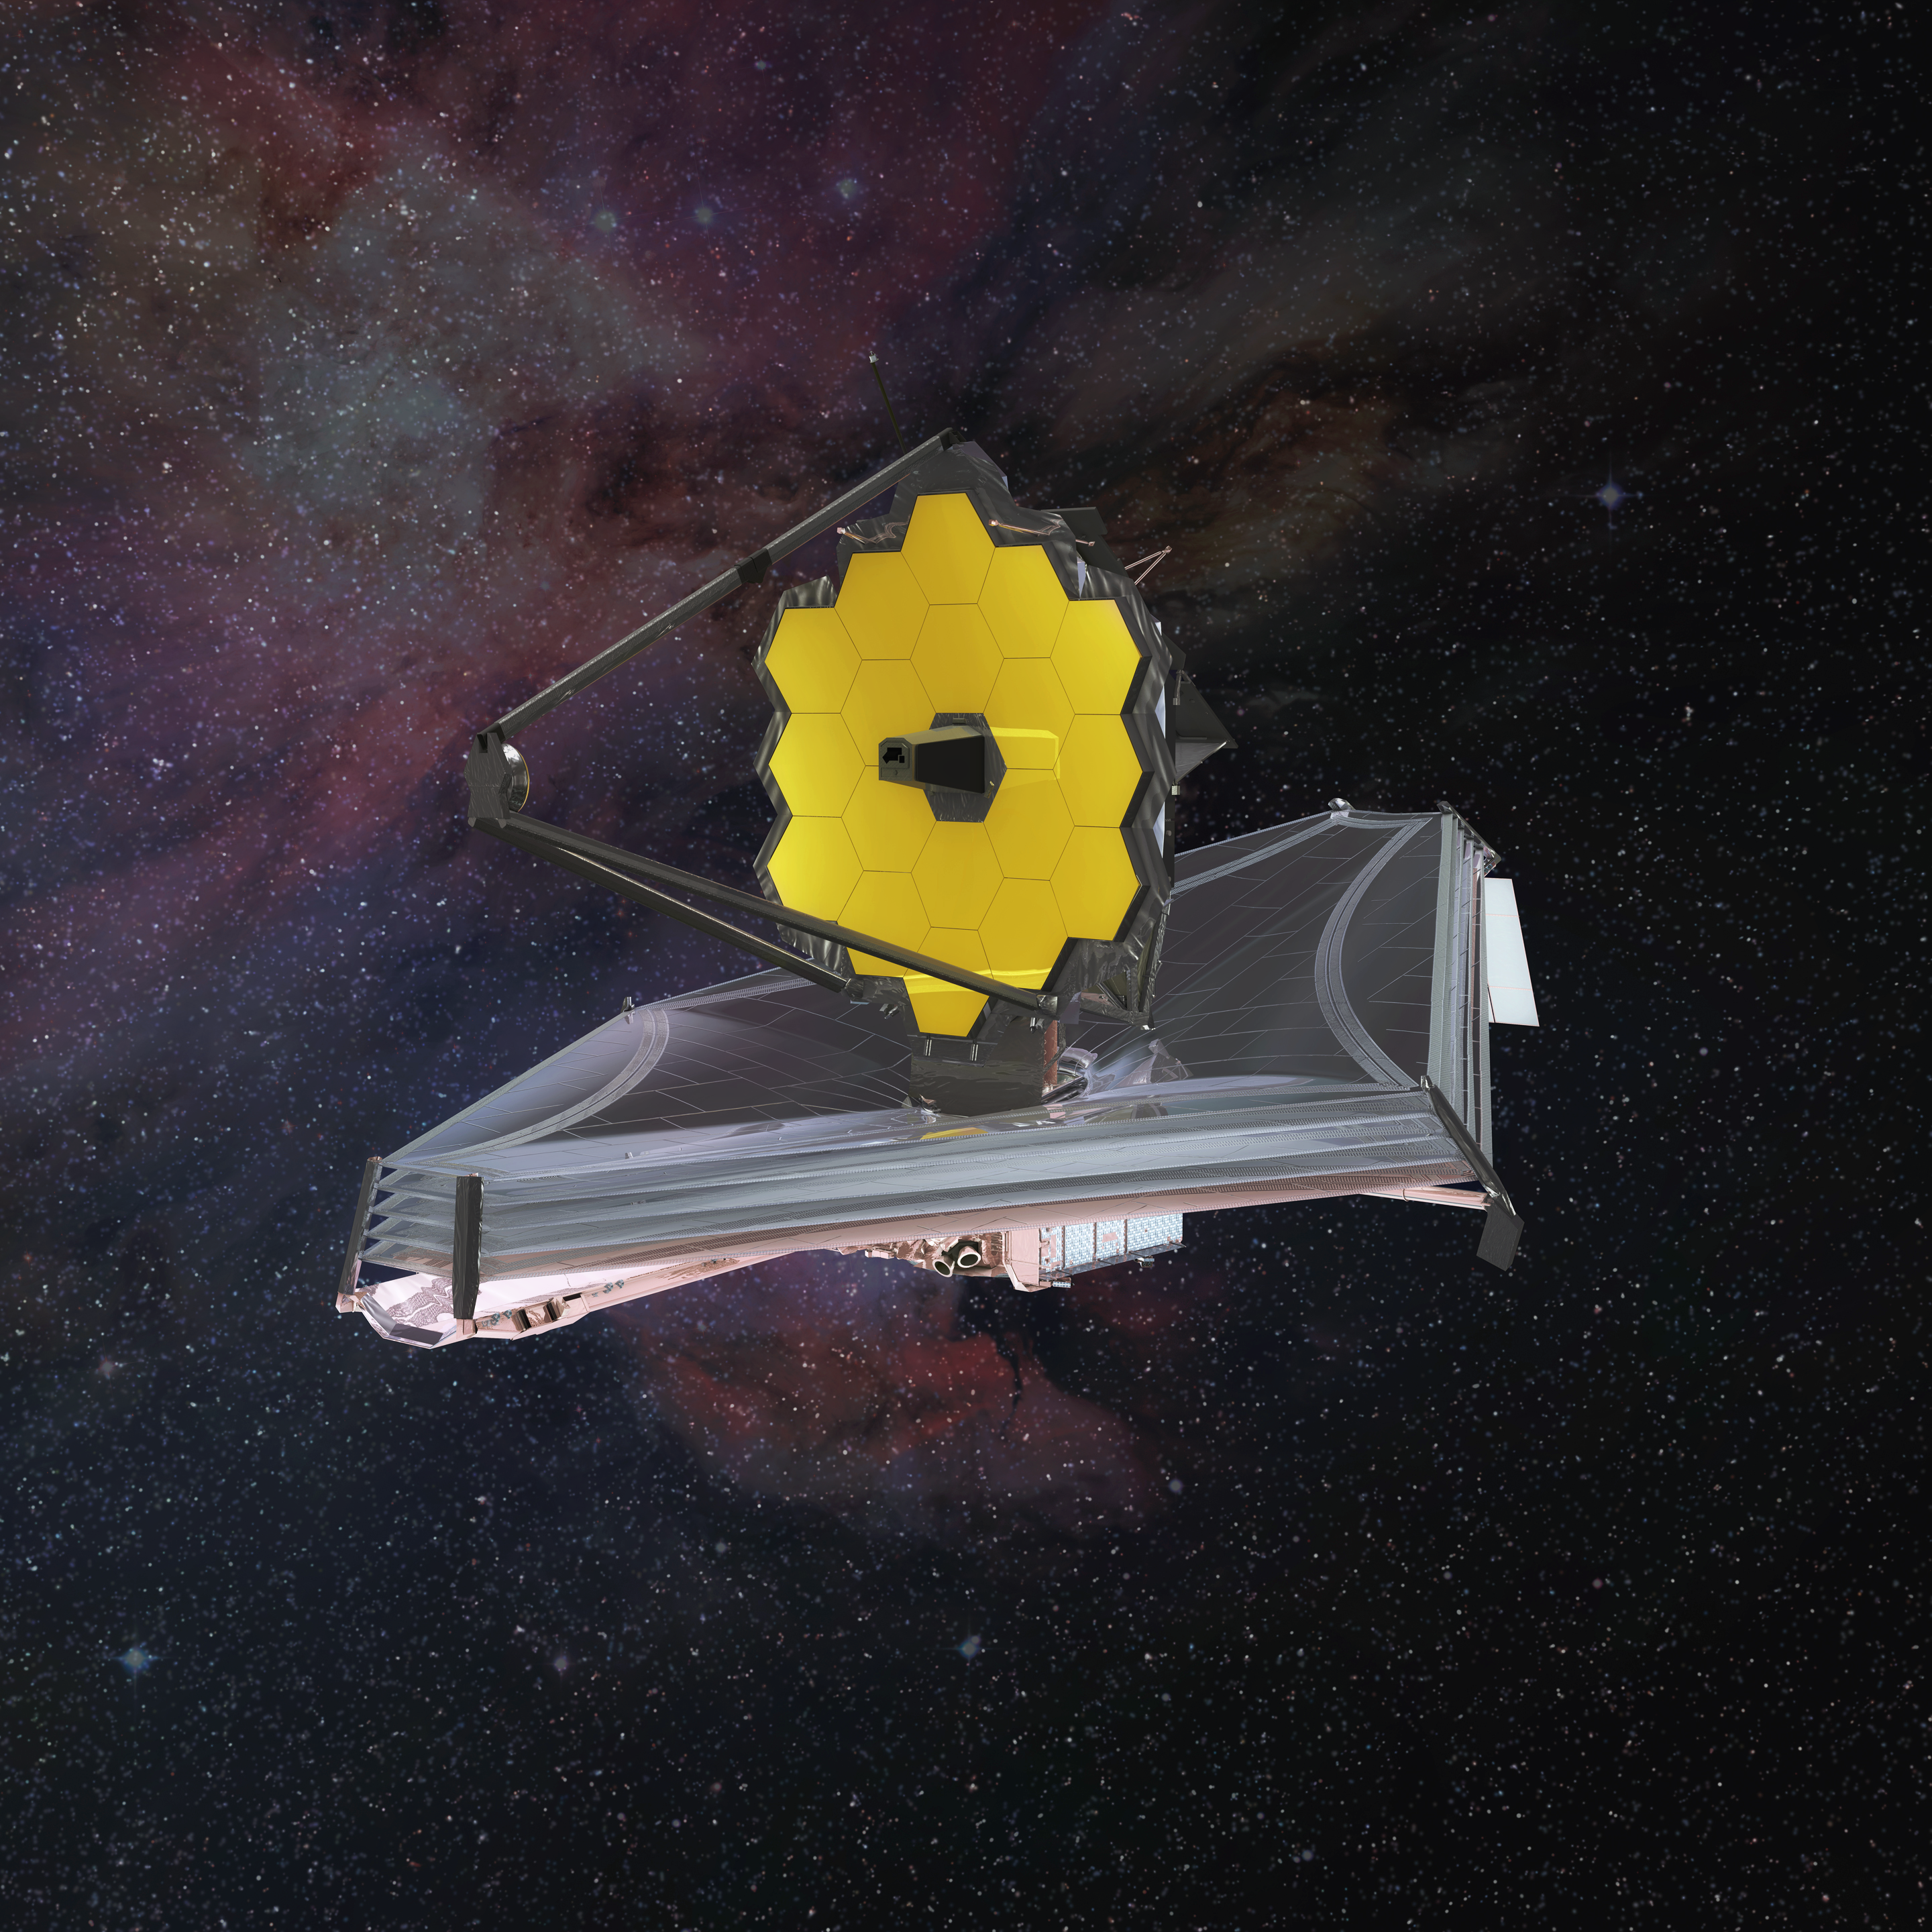

The James Webb Space Telescope

In addition to looking at distant stars, galaxies and exoplanets, the NASA/ESA/CSA James Webb Space Telescope will investigate our Solar System.

Credit: Northrup Grumman